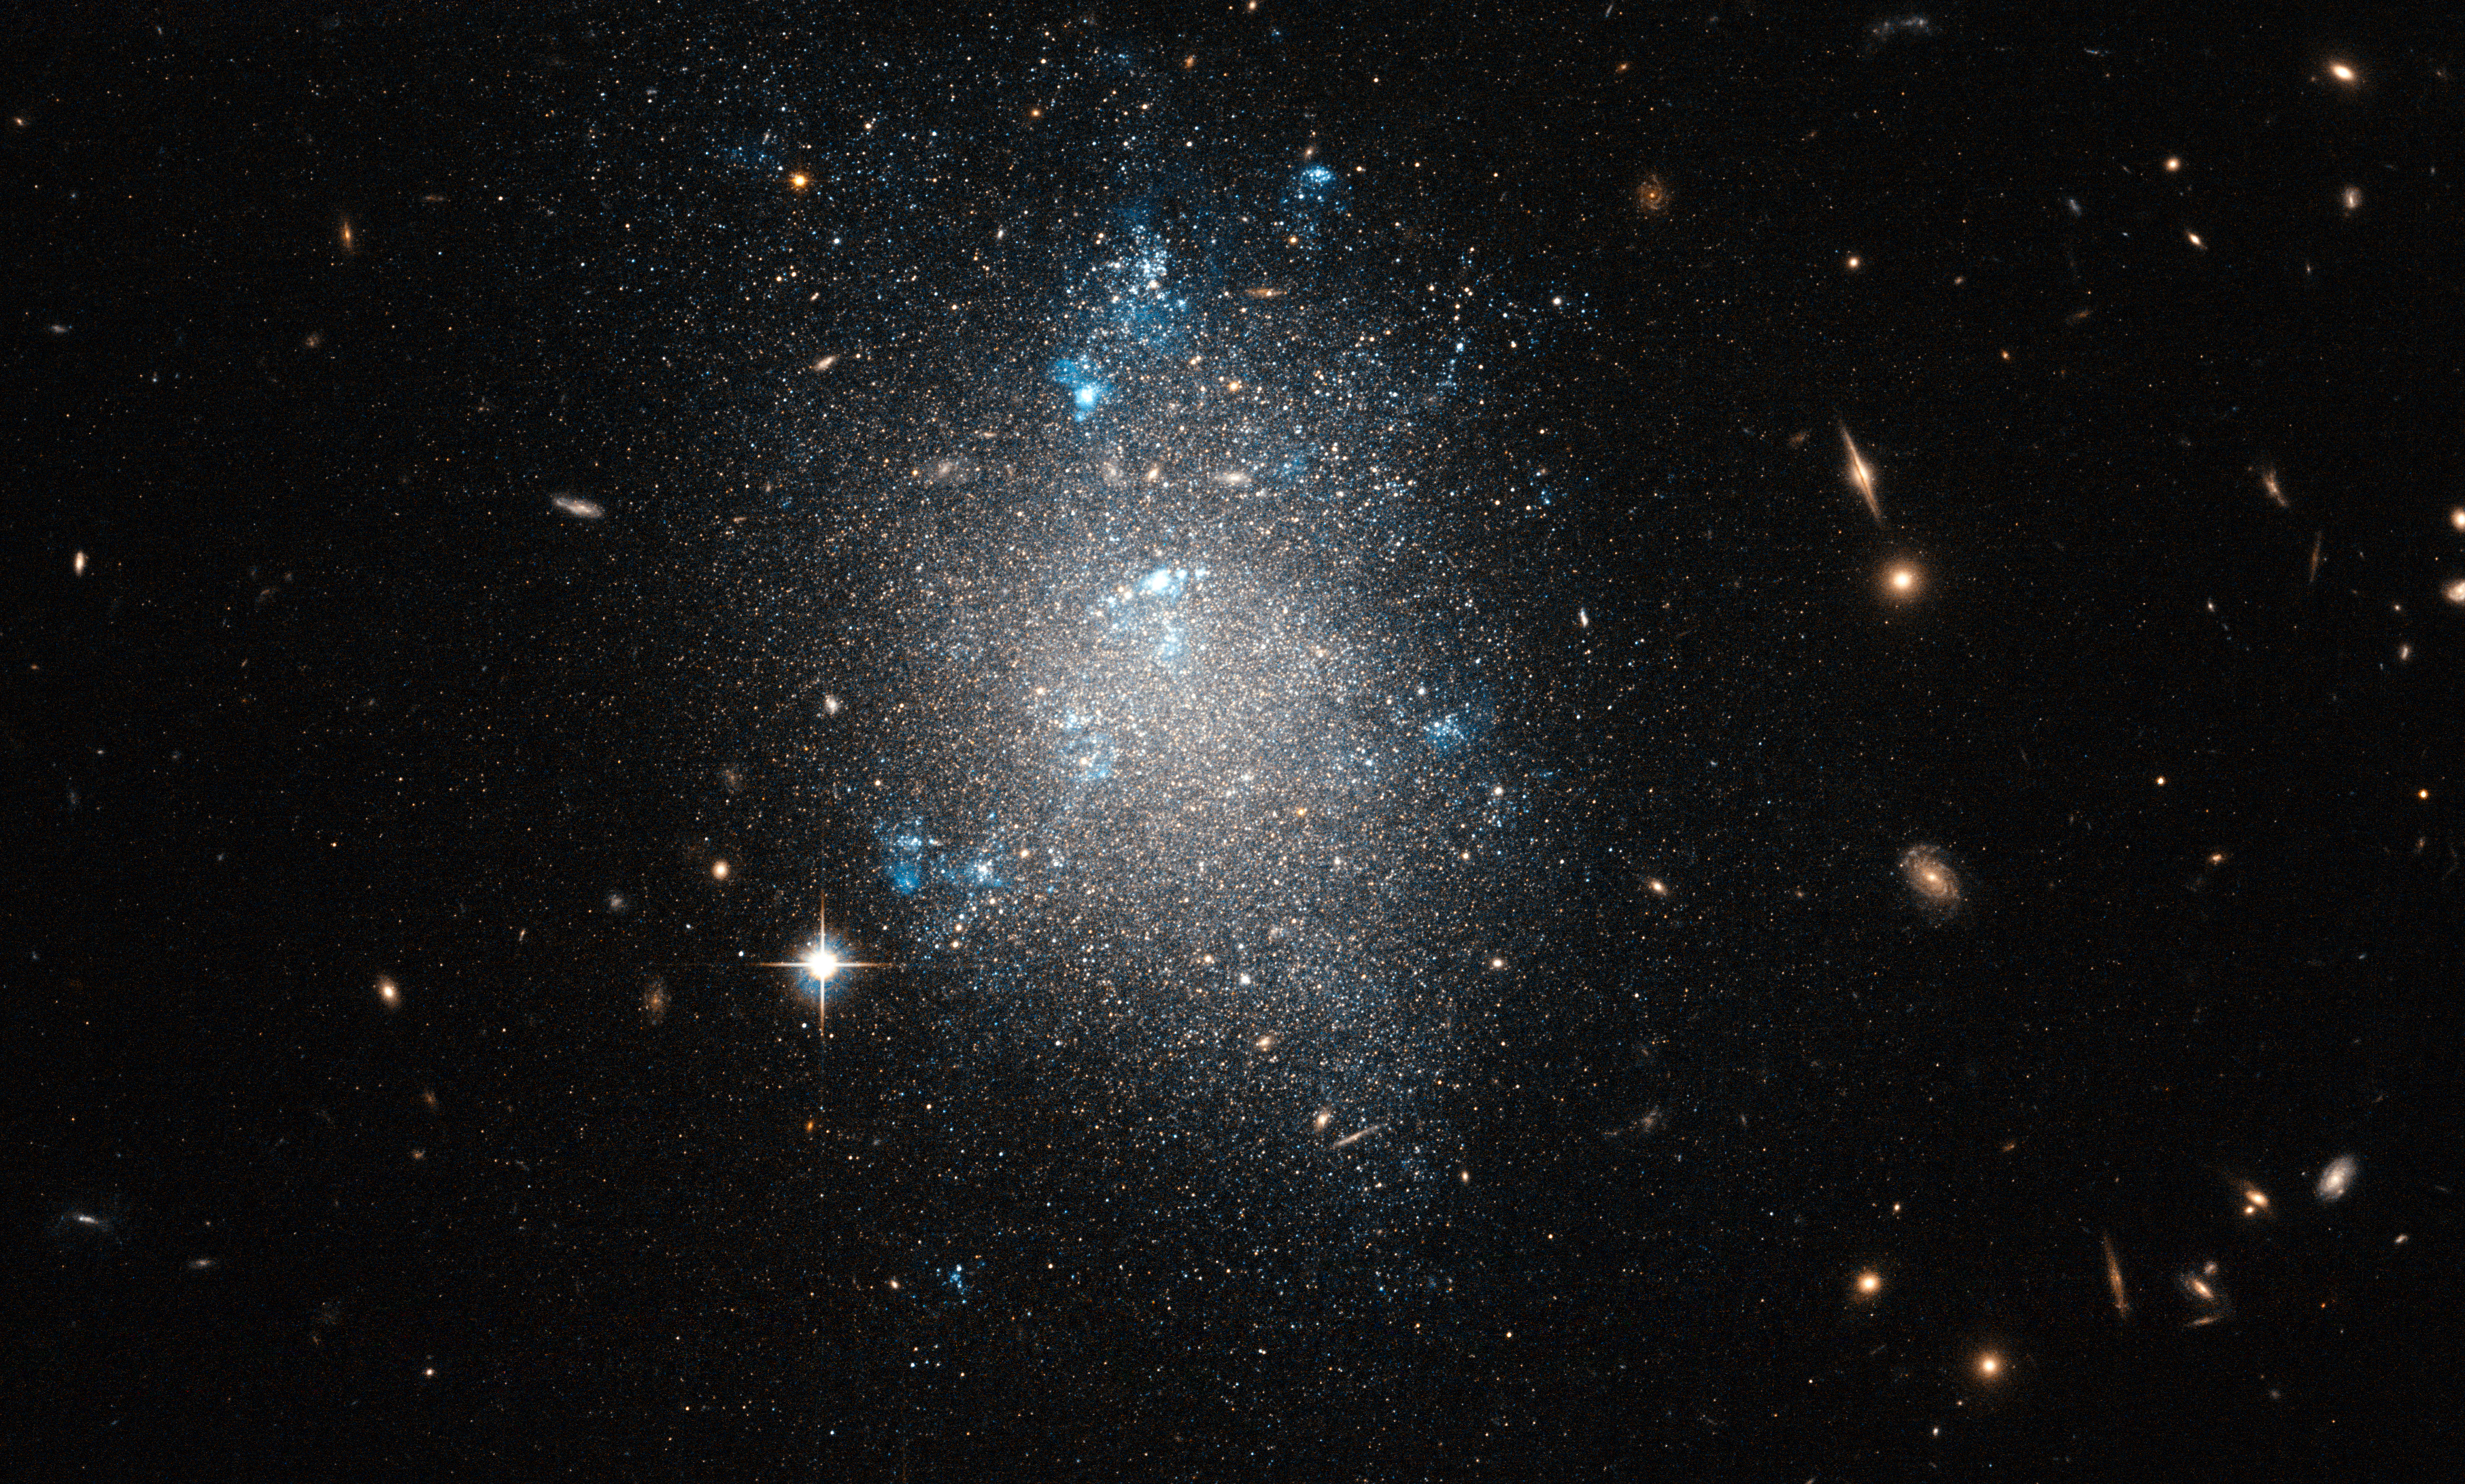

An archetypal dwarf galaxy

The constellation of Ursa Major (The Great Bear) is home to Messier 101, the Pinwheel Galaxy. One of the biggest and brightest spiral galaxies in the night sky, Messier 101 is also the subject of one of Hubble's most famous images (heic0602). Like the Milky Way, Messier 101 is not alone, with smaller dwarf galaxies in its neighbourhood.

NGC 5477, one of these dwarf galaxies in the Messier 101 group, is the subject of this image from the NASA/ESA Hubble Space Telescope. Without obvious structure, but with visible signs of ongoing starbirth, NGC 5477 looks much like an archetypal dwarf irregular galaxy. The bright nebulae that extend across much of the galaxy are clouds of glowing hydrogen gas in which new stars are forming. These glow pinkish red in real life, although the selection of green and infrared filters through which this image was taken makes them appear almost white.

The observations were taken as part of a project to measure accurate distances to a range of galaxies within about 30 million light-years from Earth, by studying the brightness of red giant stars.

In addition to NGC 5477, the image includes numerous galaxies in the background, including some that are visible right through NGC 5477. This serves as a reminder that galaxies, far from being solid, opaque objects, are actually largely made up of the empty space between their stars.

This image is a combination of exposures taken through green and infrared filters using Hubble's Advanced Camera for Surveys. The field of view is approximately 3.3 by 3.3 arcminutes.

Credit: ESA/Hubble & NASA